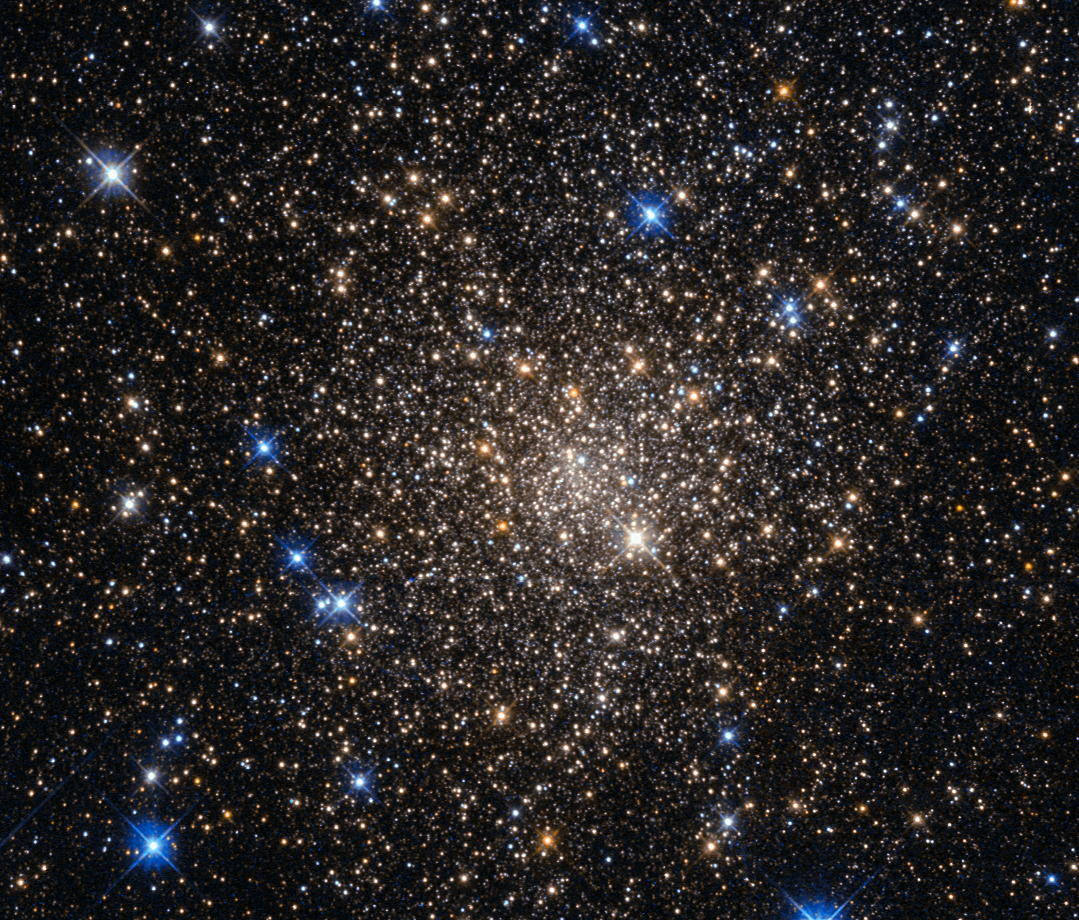

A home for old stars

This image, taken with the Wide Field Planetary Camera 2 on board the NASA/ESA Hubble Space Telescope, shows the globular cluster Terzan 1. Lying around 20 000 light-years from us in the constellation of Scorpius (The Scorpion), it is one of about 150 globular clusters belonging to our galaxy, the Milky Way.

Typical globular clusters are collections of around a hundred thousand stars, held together by their mutual gravitational attraction in a spherical shape a few hundred light-years across. It is thought that every galaxy has a population of globular clusters. Some, like the Milky Way, have a few hundred, while giant elliptical galaxies can have several thousand.

They contain some of the oldest stars in a galaxy, hence the reddish colours of the stars in this image — the bright blue ones are foreground stars, not part of the cluster. The ages of the stars in the globular cluster tell us that they were formed during the early stages of galaxy formation! Studying them can also help us to understand how galaxies formed.

Terzan 1, like many globular clusters, is a source of X-rays. It is likely that these X-rays come from binary star systems that contain a dense neutron star and a normal star. The neutron star drags material from the companion star, causing a burst of X-ray emission. The system then enters a quiescent phase in which the neutron star cools, giving off X-ray emission with different characteristics, before enough material from the companion builds up to trigger another outburst.

Credit: NASA & ESA, Acknowledgement: Judy Schmidt (Geckzilla)